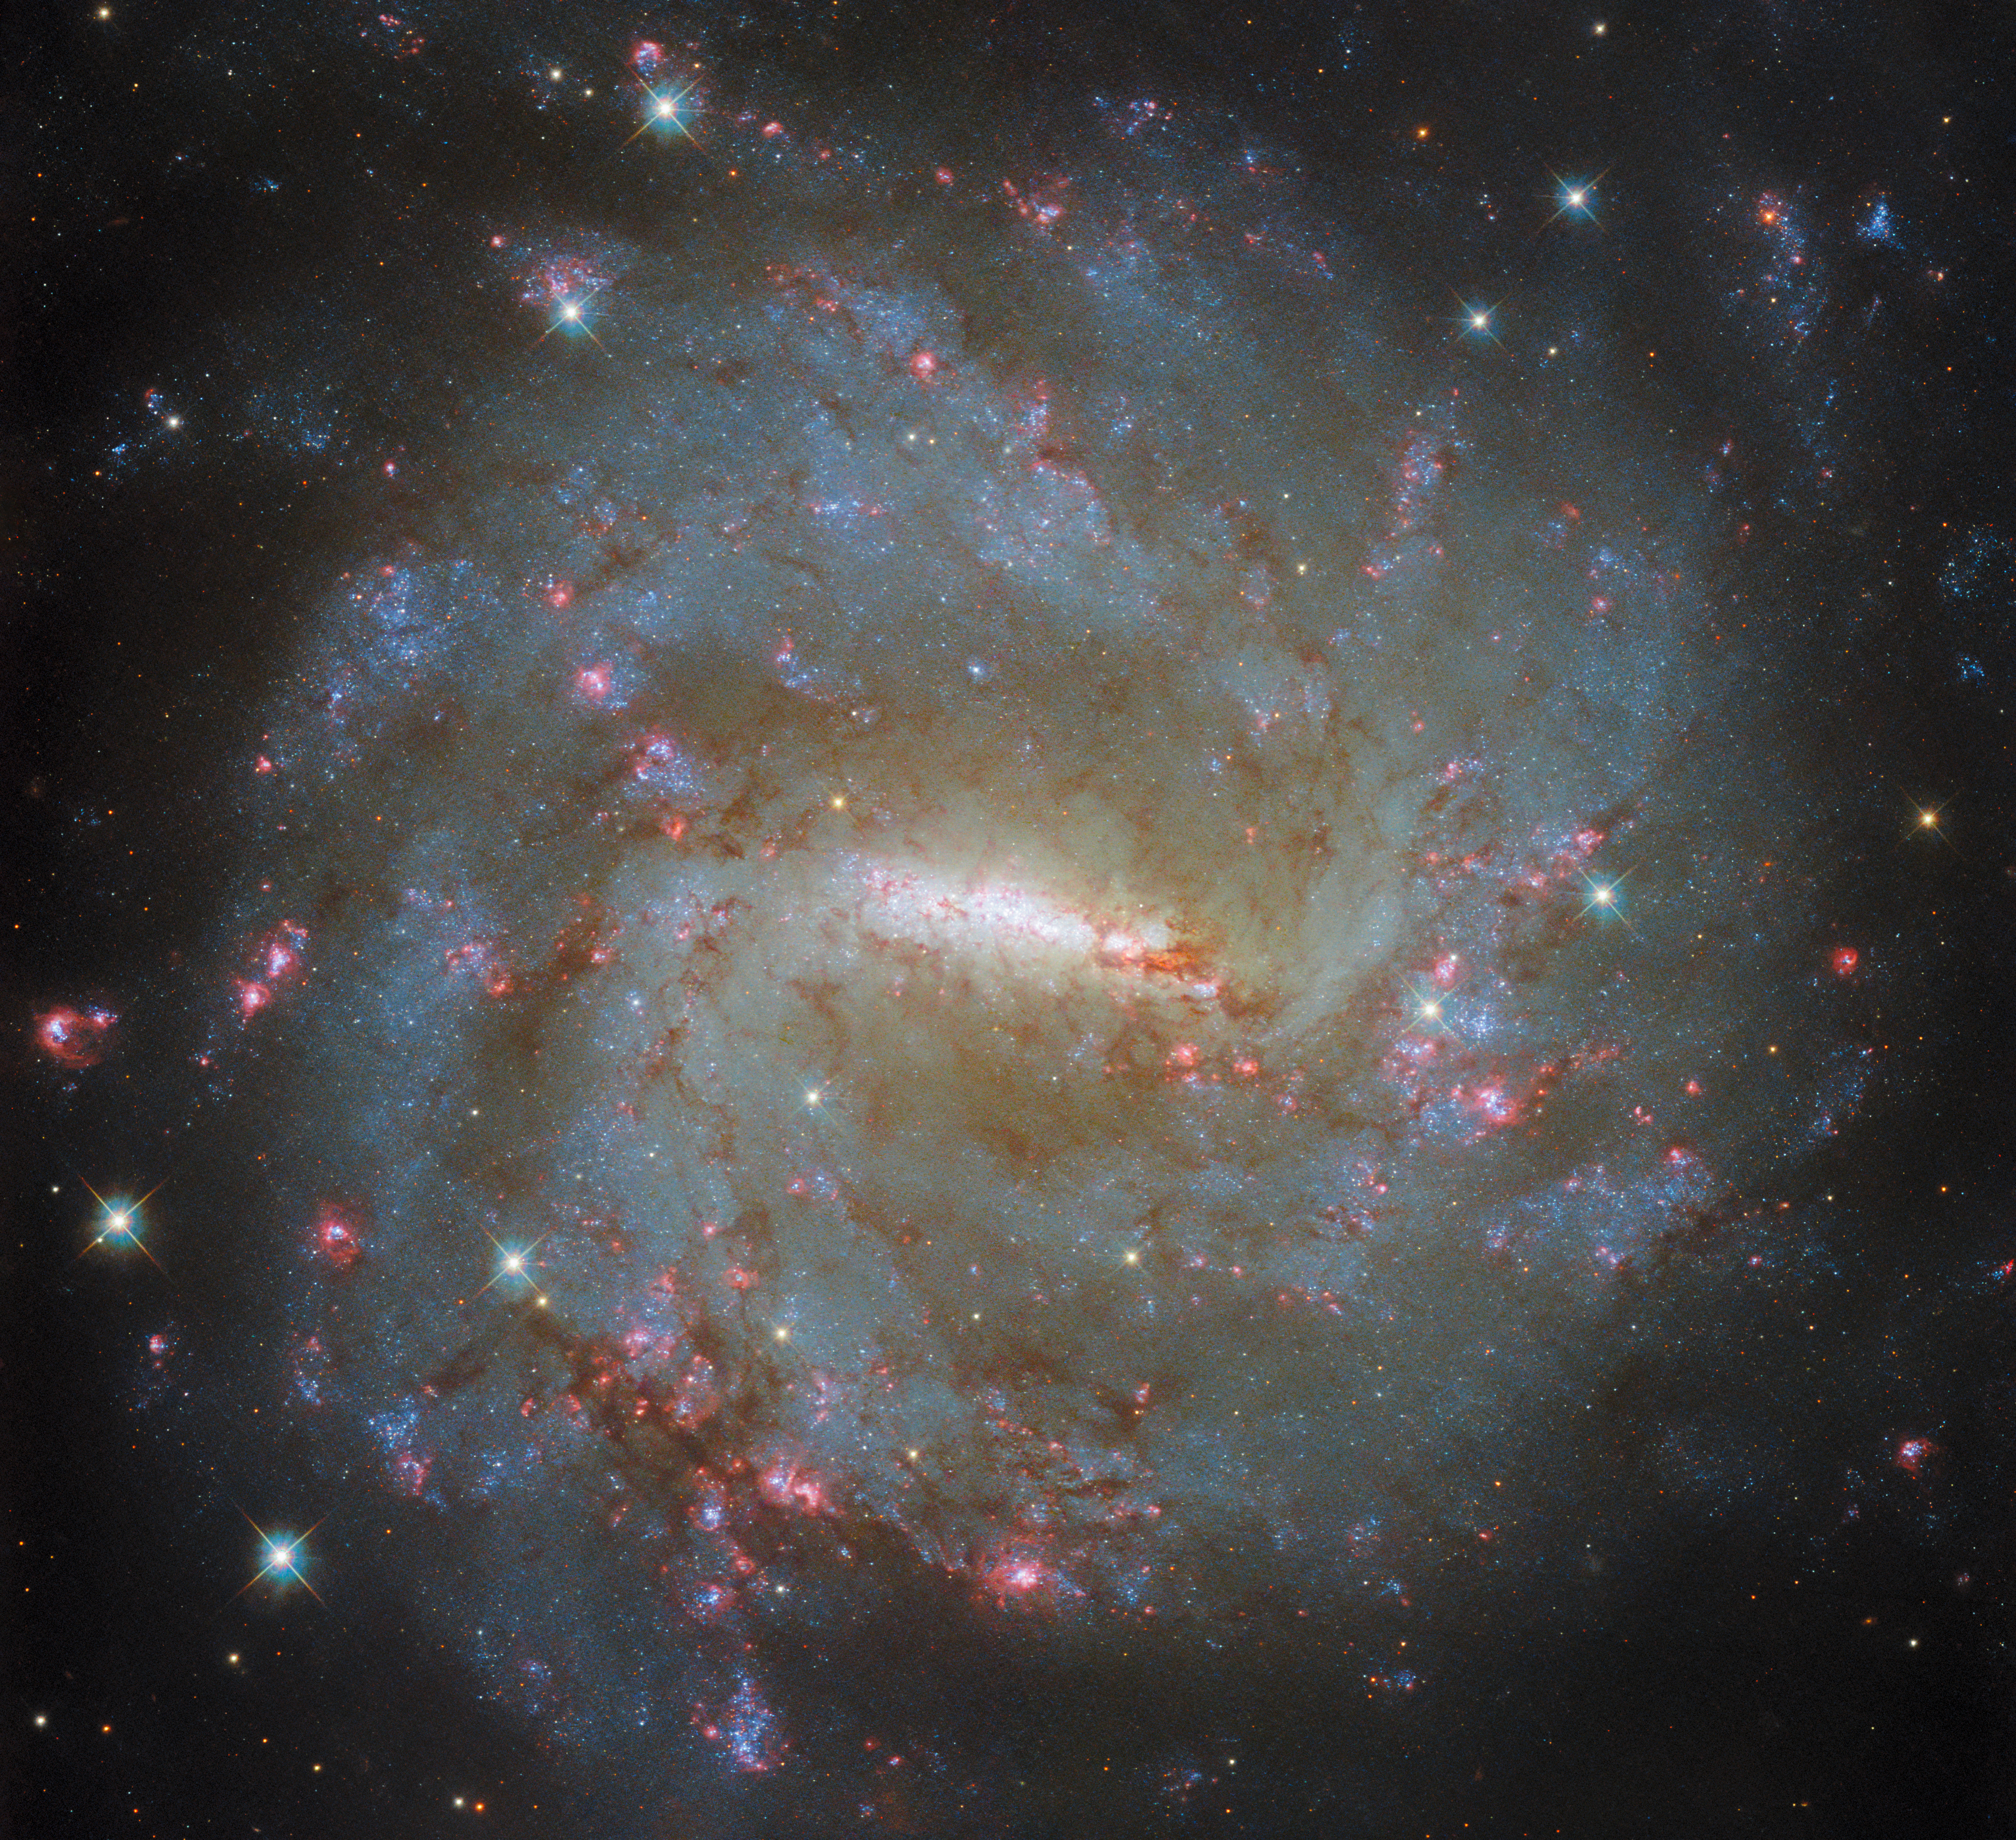

A broad and narrow galactic view

This Picture of the Week features the barred spiral galaxy NGC 3059, which lies about 57 million light-years from Earth. The data used to compose this image were collected by Hubble in May 2024, as part of an observing programme that studied a number of galaxies. All the observations were made using the same range of filters: partially transparent materials that allow only very specific wavelengths of light to pass through.

Filters are used extensively in observational astronomy, and can be calibrated to allow either extremely narrow or somewhat broader ranges of light through. Narrow-band filters are invaluable from a scientific perspective because certain light wavelengths are associated with specific physical and chemical processes. For example, under particular conditions, hydrogen atoms are known to emit red light with wavelength value of 656.46 nanometres. Red light at this wavelength is known as H-alpha emission, or the ‘H-alpha line’. It is very useful to astronomers because its presence acts as an indicator of certain physical processes and conditions; it is often a tell-tale sign of new stars being formed, for example.

Thus, narrow-band filters calibrated to allow H-alpha emission through can be used to identify regions of space where stars are forming.

Such a filter was used for this image, the narrow-band filter called F657N or the H-alpha filter. The F stands for filter, and the N stands for narrow. The numerical value refers to the peak wavelength (in nanometres) that the filter lets through. The eagle-eyed amongst you may have noticed that 657 is very close to the 656.46 H-alpha line’s wavelength. Data collected using five other filters contributed to this image as well, all of which were wide-band filters; meaning that they allow a wider range of light wavelengths through. This is less useful for identifying extremely specific lines (such as the H-alpha line) but still enables astronomers to explore relatively specific parts of the electromagnetic spectrum. In addition, collectively the information from multiple filters can be used to make beautiful images such as this one.

Credit: ESA/Hubble & NASA, D. Thilker